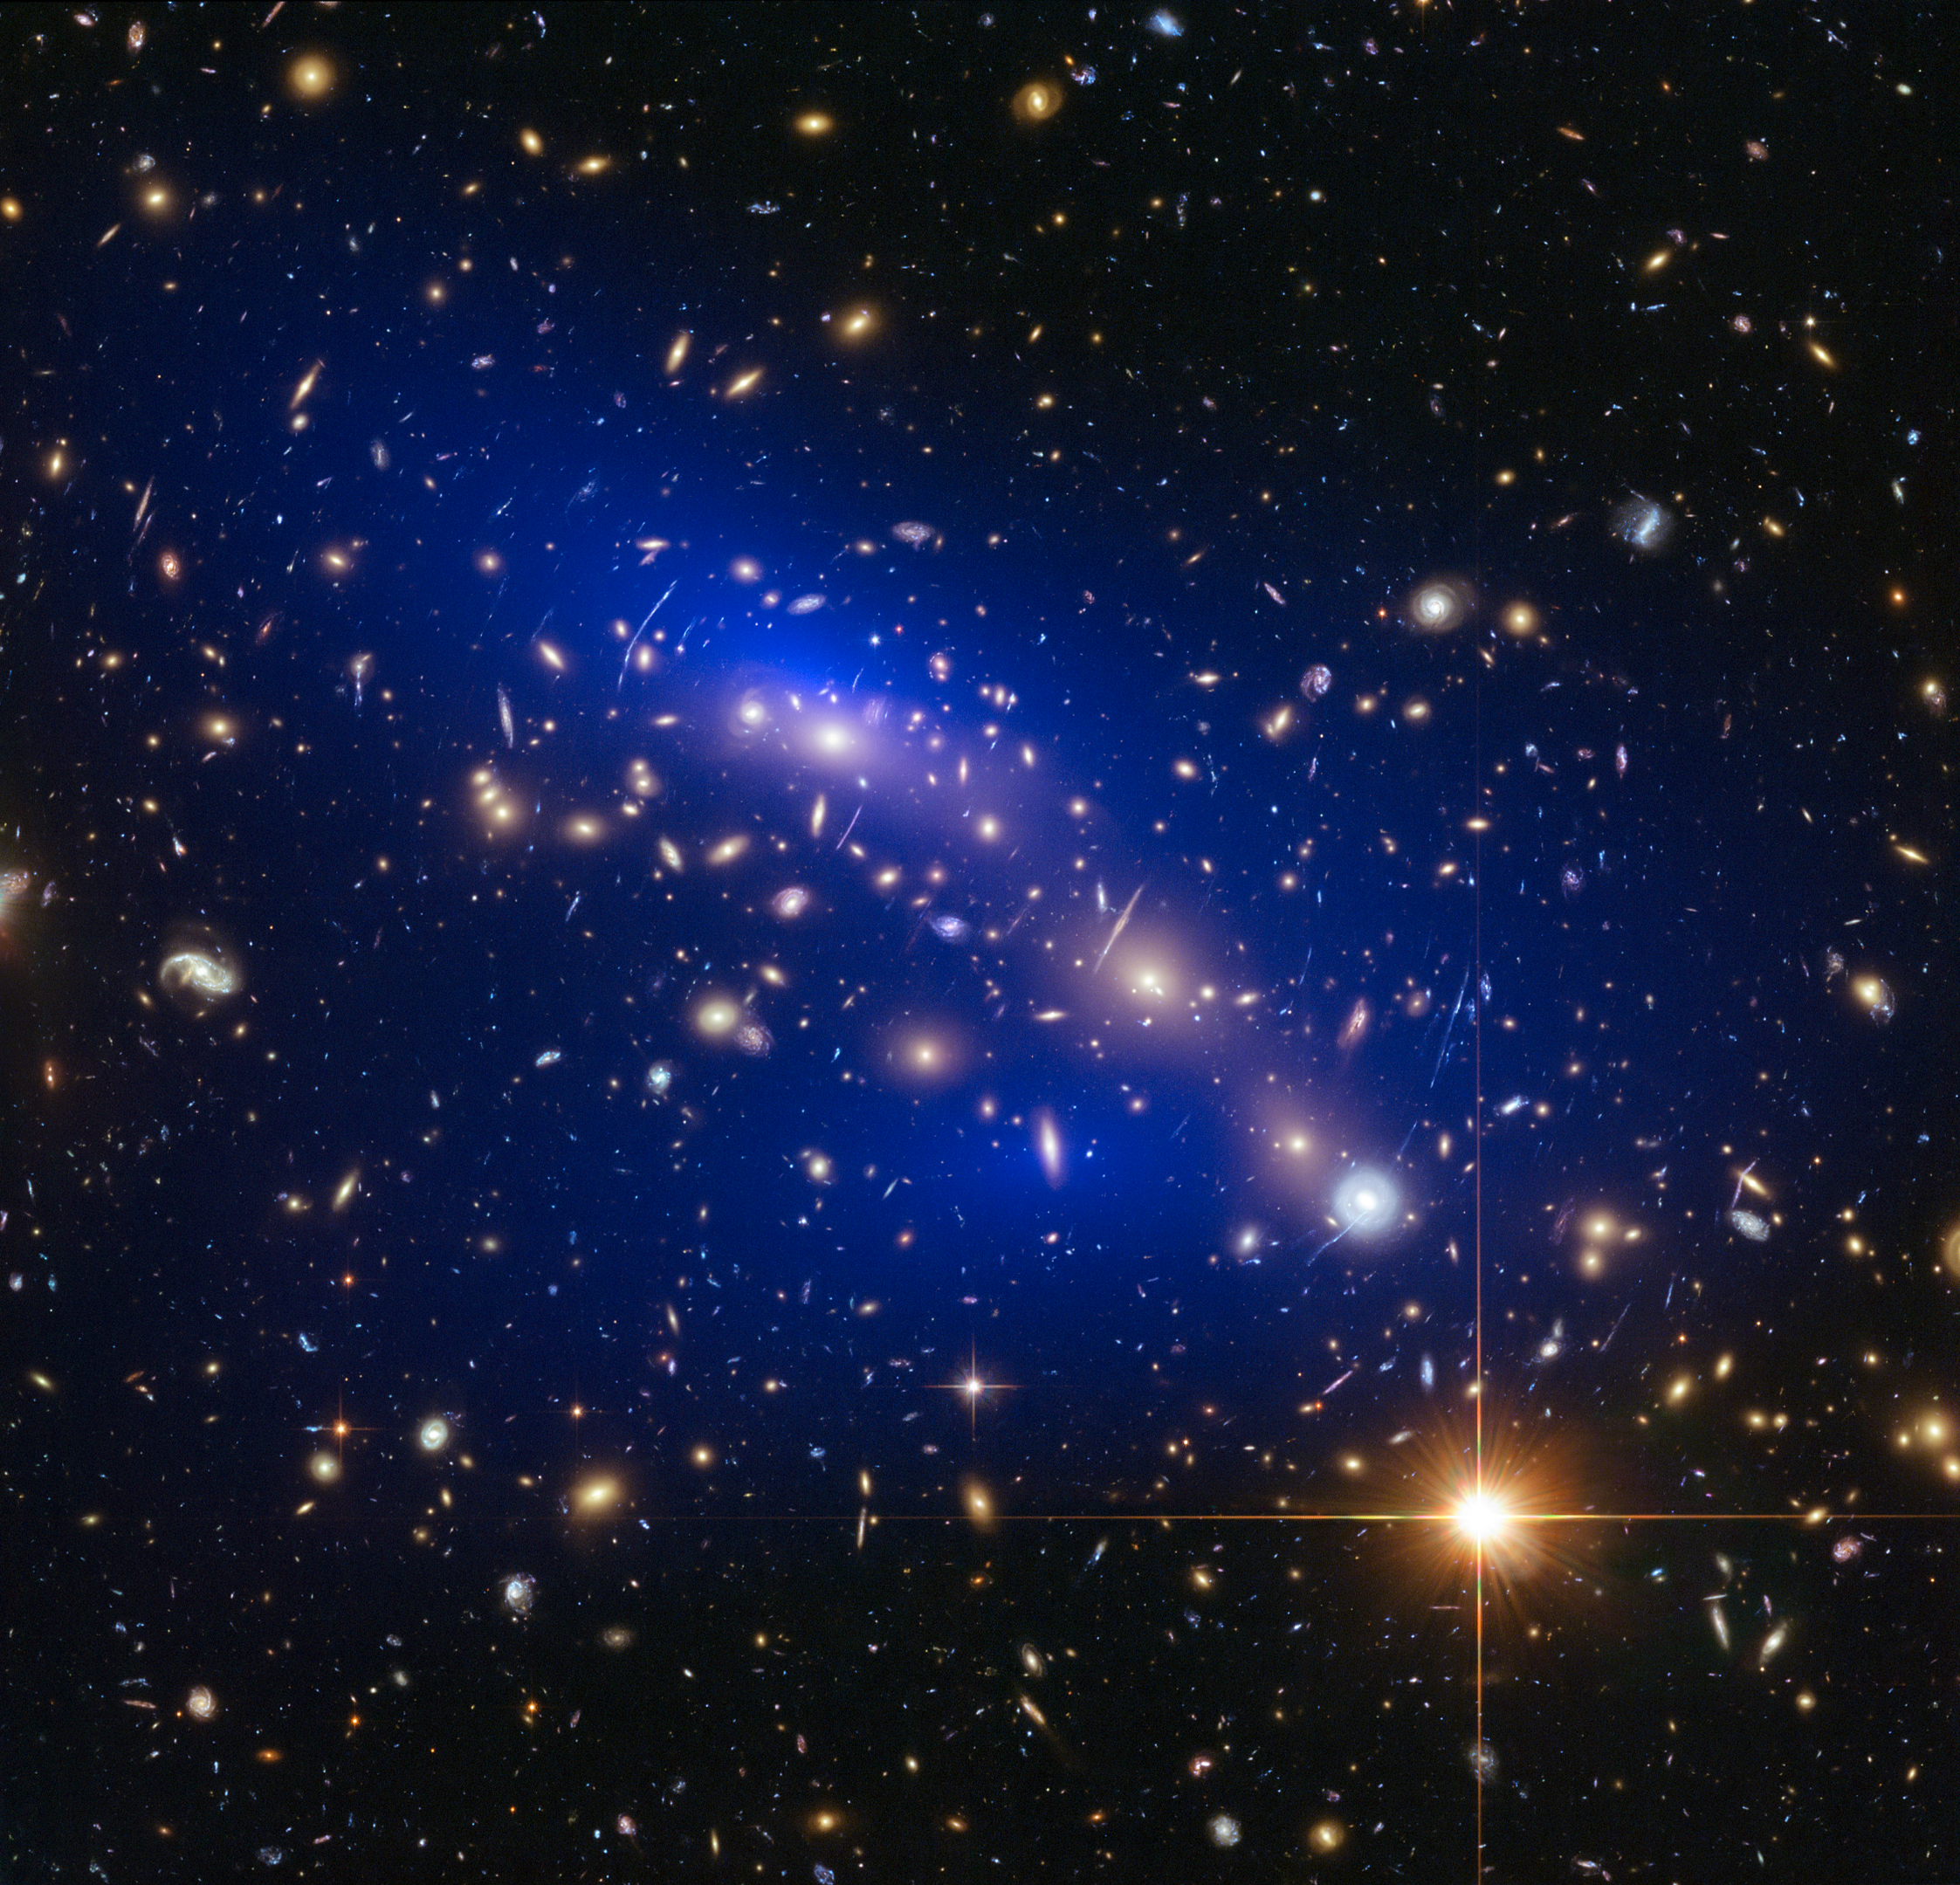

Galaxy cluster MACS J0416.1–2403 with dark matter map

This is a NASA/ESA Hubble Space Telescope image of the galaxy cluster MACS J0416.1–2403. Shown in blue on the image is a map of the dark matter found within the cluster. This cluster was part of a study of 72 galaxy cluster collisions which determined that dark matter interacts with other dark matter even less than previously thought.

Credit: NASA, ESA, D. Harvey (École Polytechnique Fédérale de Lausanne, Switzerland), R. Massey (Durham University, UK) and HST Frontier Fields